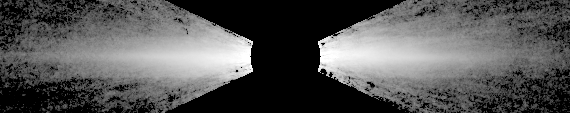

Warped Disc around Beta Pictoris

This is a visible light image of the disk, which appears spindle-like because it is tilted nearly edge-on to our view.

The disk is made up of microscopic dust grains of ices and silicate particles, and shines by reflected light from the star.

Credit: Chris Burrows, Space Telescope Science Institute (STScI) the European Space Agency (ESA), J. Krist (STScI), the WFPC2 IDT team, and NASA